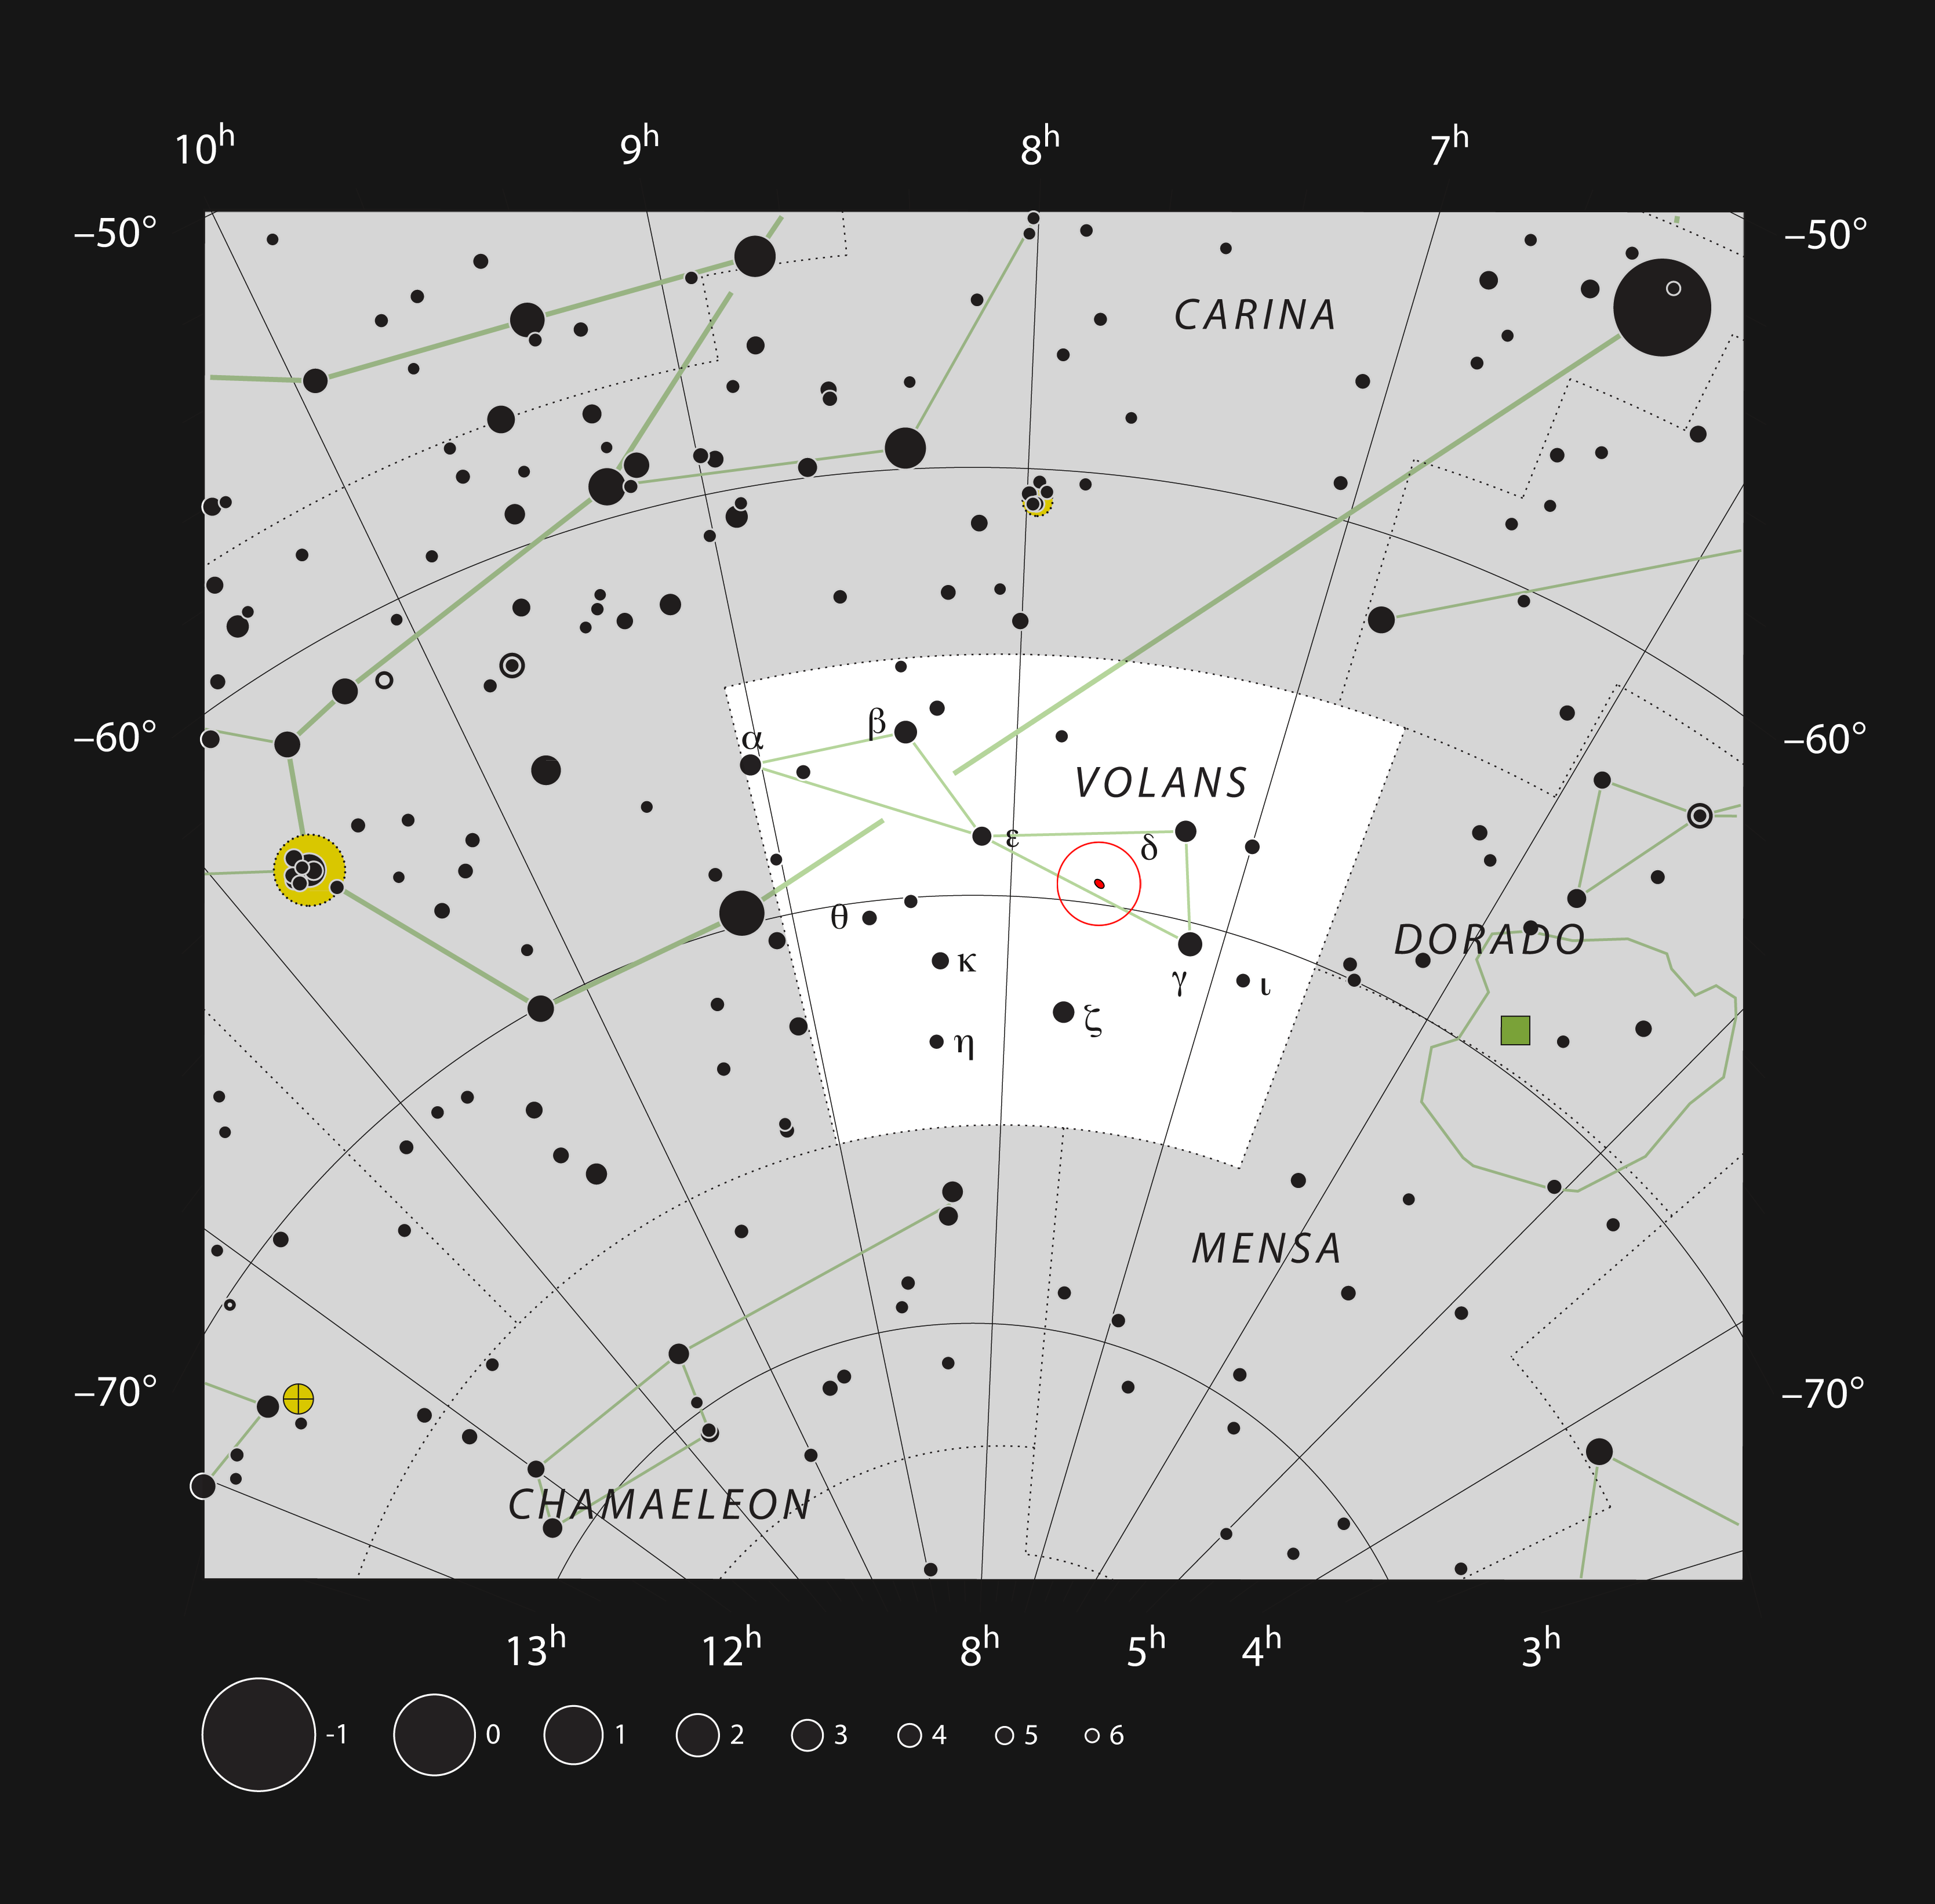

The Meathook galaxy, NGC 2442, in the constellation of Volans

This chart shows the location of the peculiar spiral galaxy NGC 2442 within the constellation of Volans (The Flying Fish). This map shows most of the stars visible to the unaided eye under good conditions and the galaxy itself is marked as a small red ellipse surrounded by a red circle. This galaxy can be easily seen with a moderate-sized telescope.

Credit: ESO, IAU and Sky & Telescope